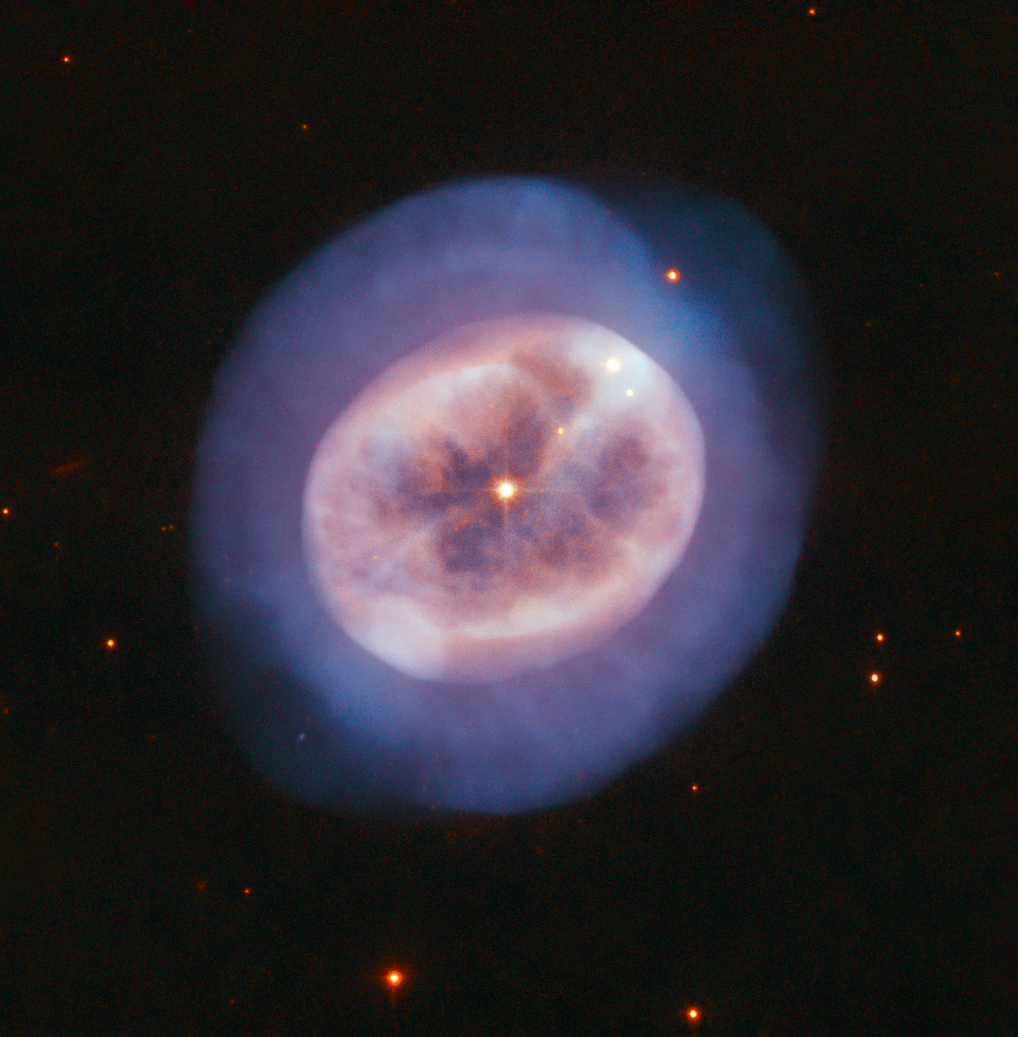

The Inky Abyss

Although it looks more like an entity seen through a microscope than a telescope, this rounded object, named NGC 2022, is certainly no alga or tiny, blobby jellyfish. Instead, it is a vast orb of gas in space, cast off by an ageing star. The star is visible in the orb's centre, shining through the gases it formerly held onto for most of its stellar life.

When stars like the Sun grow advanced in age, they expand and glow red. These so-called red giants then begin to lose their outer layers of material into space. More than half of such a star's mass can be shed in this manner, forming a shell of surrounding gas. At the same time, the star's core shrinks and grows hotter, emitting ultraviolet light that causes the expelled gases to glow.

This type of object is called, somewhat confusingly, a planetary nebula, though it has nothing to do with planets. The name derives from the rounded, planet-like appearance of these objects in early telescopes.

NGC 2022 is located in the constellation of Orion (The Hunter).

Credit: ESA/Hubble & NASA, R. Wade